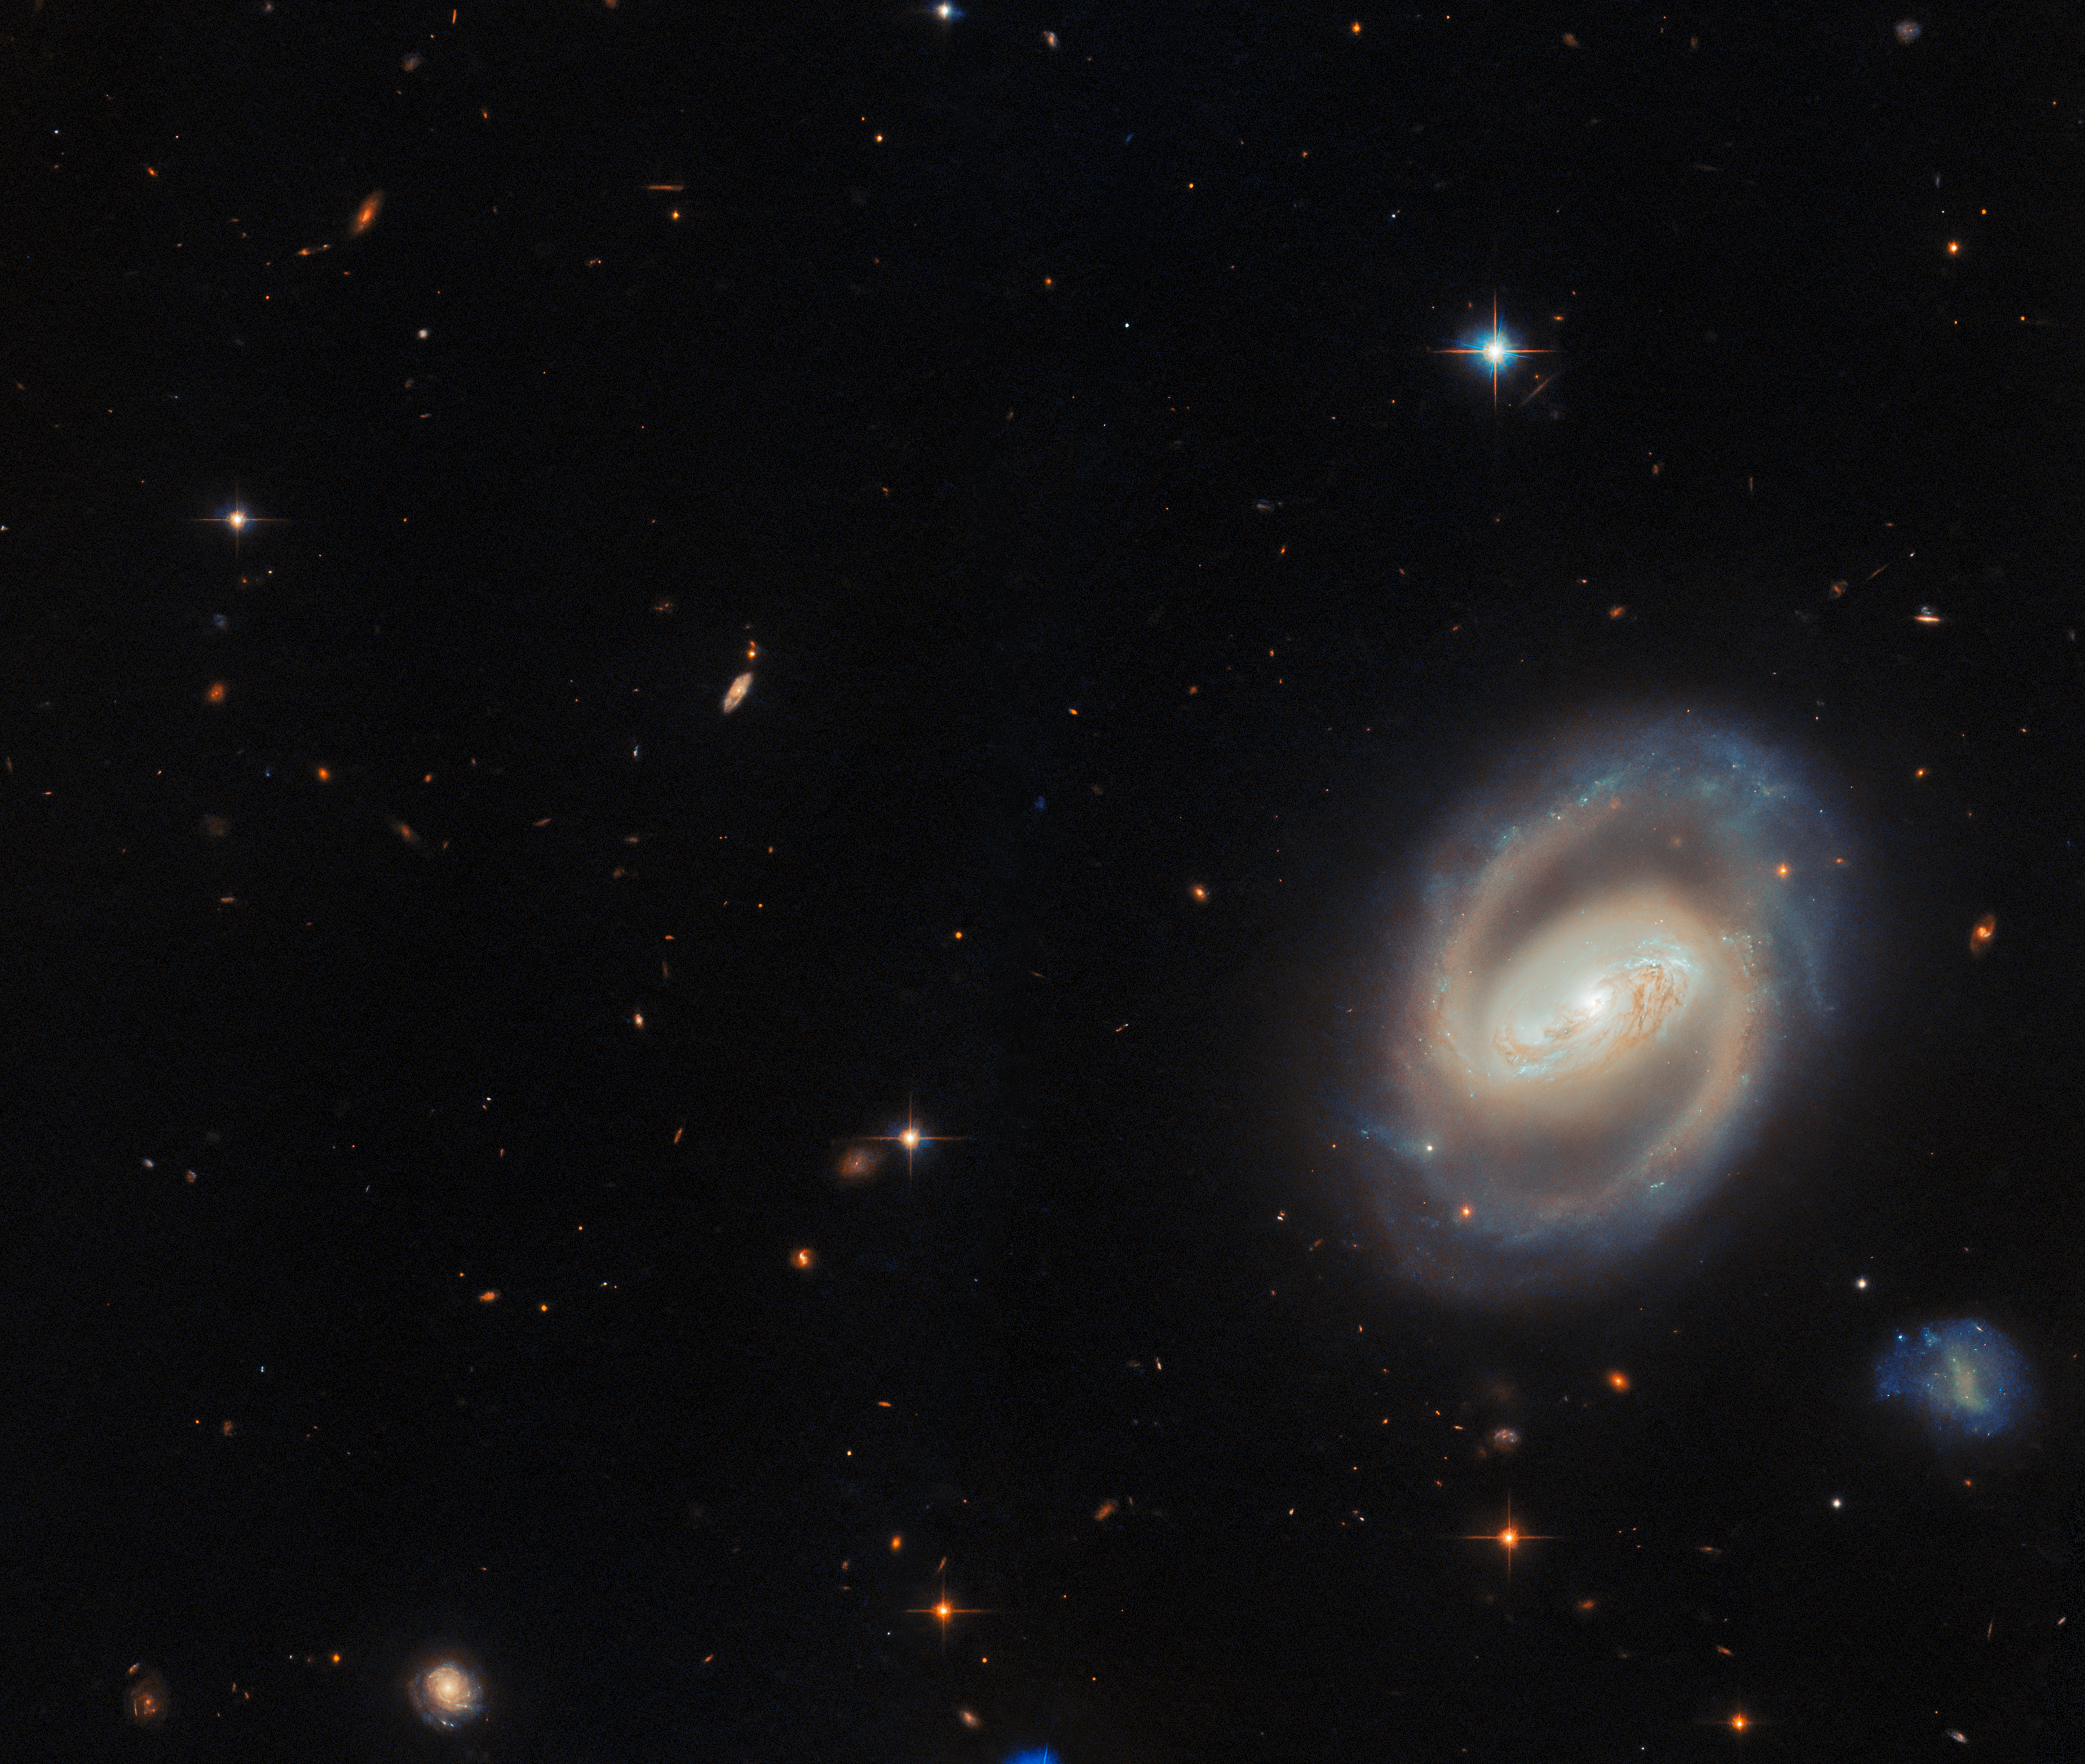

IC 486 (wide-field view)

IC 486 lies in the constellation Gemini (the Twins), around 380 million light-years from Earth. Classified as a barred spiral galaxy, it features a bright central bar-shaped structure from which its spiral arms unfurl, wrapping around the core in a smooth, almost ring-like pattern.

This wide-field view also features a vibrant scene of distant background galaxies and foreground stars. Some stars appear with characteristic diffraction spikes. However, much of the field is dominated by the more diffuse, orange-red smudges of far more distant galaxies.

Credit: ESA/Hubble & NASA, M. J. Koss, A. J. Barth